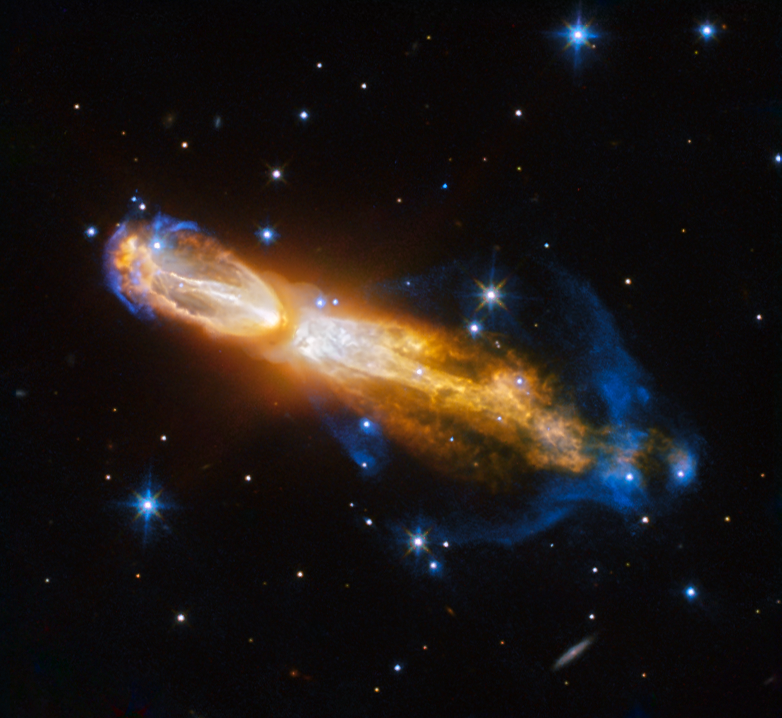

The Calabash clash

The Calabash Nebula, pictured here — which has the technical name OH 231.8+04.2 — is a spectacular example of the death of a low-mass star like the Sun. This image taken by the NASA/ESA Hubble Space Telescope shows the star going through a rapid transformation from a red giant to a planetary nebula, during which it blows its outer layers of gas and dust out into the surrounding space. The recently ejected material is spat out in opposite directions with immense speed — the gas shown in yellow is moving close to a million kilometres an hour.

Astronomers rarely capture a star in this phase of its evolution because it occurs within the blink of an eye — in astronomical terms. Over the next thousand years the nebula is expected to evolve into a fully fledged planetary nebula.

The nebula is also known as the Rotten Egg Nebula because it contains a lot of sulphur, an element that, when combined with other elements, smells like a rotten egg — but luckily, it resides over 5000 light-years away in the constellation of Puppis (The Poop deck).

Credit: ESA/Hubble & NASA
Acknowledgement: Judy Schmidt